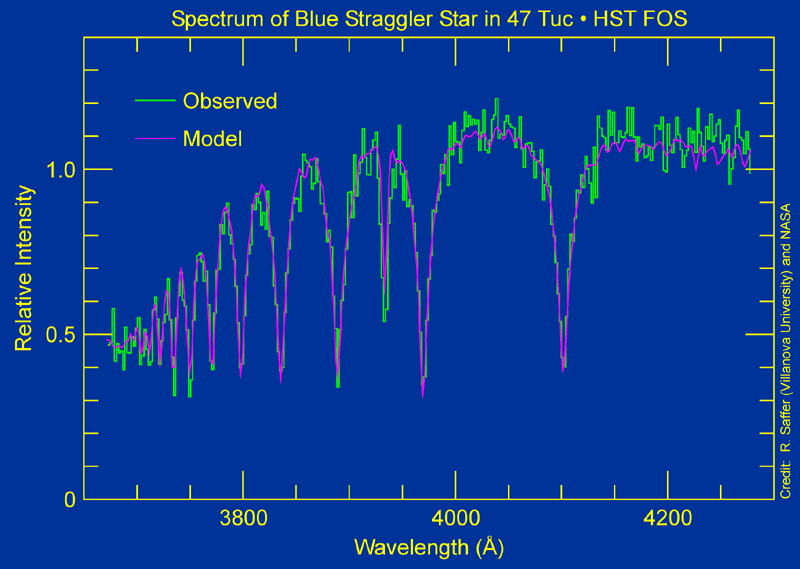

Blue stragglers in globular cluster 47 Tucanae

A star's light yields clues about its identity which are not revealed in an image. That's why astronomers use spectrographs to decode the light. A spectrograph disperses light into its component colors, providing information on a star's rotation velocity, temperature, and surface gravity. The spectrum above compares a computer-generated spectrum of a blue straggler star with one from the observation of the blue straggler in 47 Tucanae, taken by the Hubble Space Telescope's Faint Object Spectrograph. The model spectrum predicts the shape and depth of a blue straggler's spectral lines. Based on this comparison, the Hubble telescope observation clearly matches the model.

Credit: R. Saffer (Villanova University) and NASA/ESA